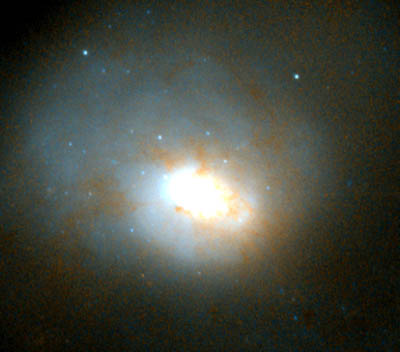

Central region of HST image of NGC 3921

In NGC 3921, we have discovered over 100 new young clusters. There are two reasons to believe that all these young clusters formed from GMCs in the merging spiral galaxies. First, in all three galaxies (N4038/39, N7252, N3921) the young clusters show same, characteristic luminosity distribution: For every very luminous cluster, there are 10 times as many clusters that are 3 times fainter, and 100 times as many clusters that are 10 times fainter. This characteristic distribution is very similar to that of GMCs in nearby galaxies, where for every very massive GMC there are 10 GMCs one-third as massive and about 100 GMCs one-tenth as massive. Also, GMCs contain about 100,000 times to about 10 million times as much mass as our sun, a range of masses nearly identical to that of globular star clusters. Second, our observations of the two more advanced merger galaxies with Hubble show that the newly-borne clusters in them have the same spatial distribution as the stars. (Explain violent relaxation, why GMCs would experience same fluctuating gravitational field during the mergers as the stars do, and thus end up with same spatial distribution; etc)

Credit: B. Whitmore (STScI)